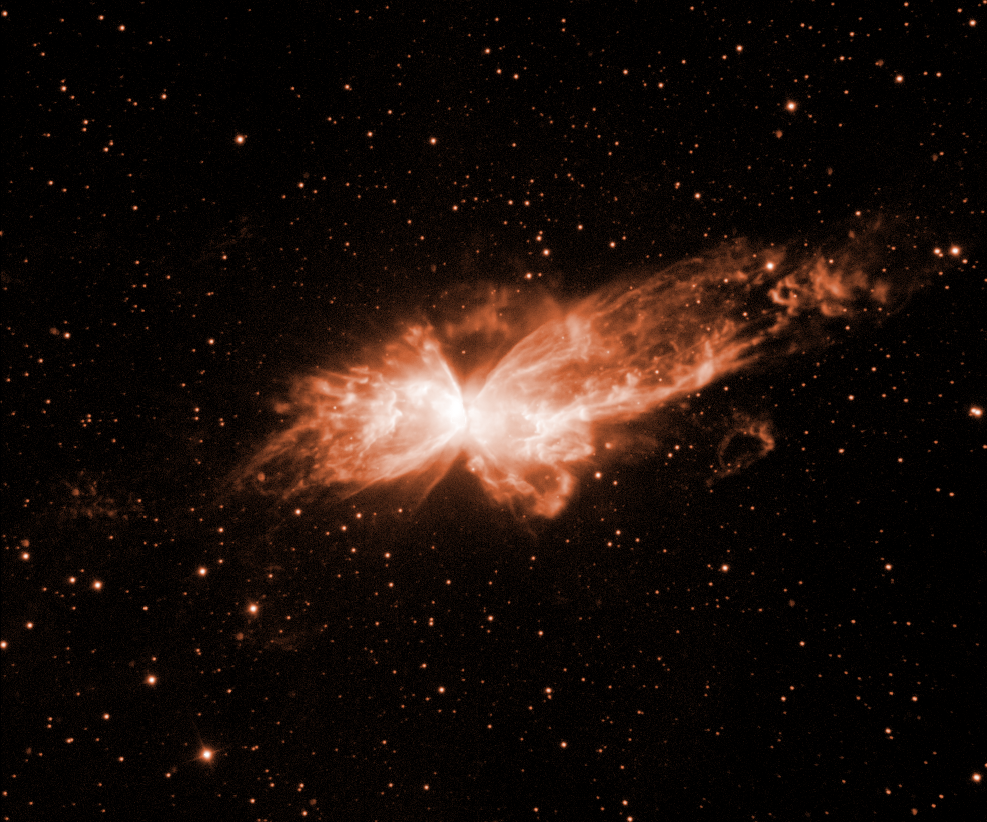

NGC 6302 (ground-based)

The Bug Nebula, NGC 6302, here imaged with the 3.6 metre telescope at ESO's La Silla Observatory by astronomer Romano L.M. Corradi.

Credit: ESA/NASA & Romano Corradi (ING)